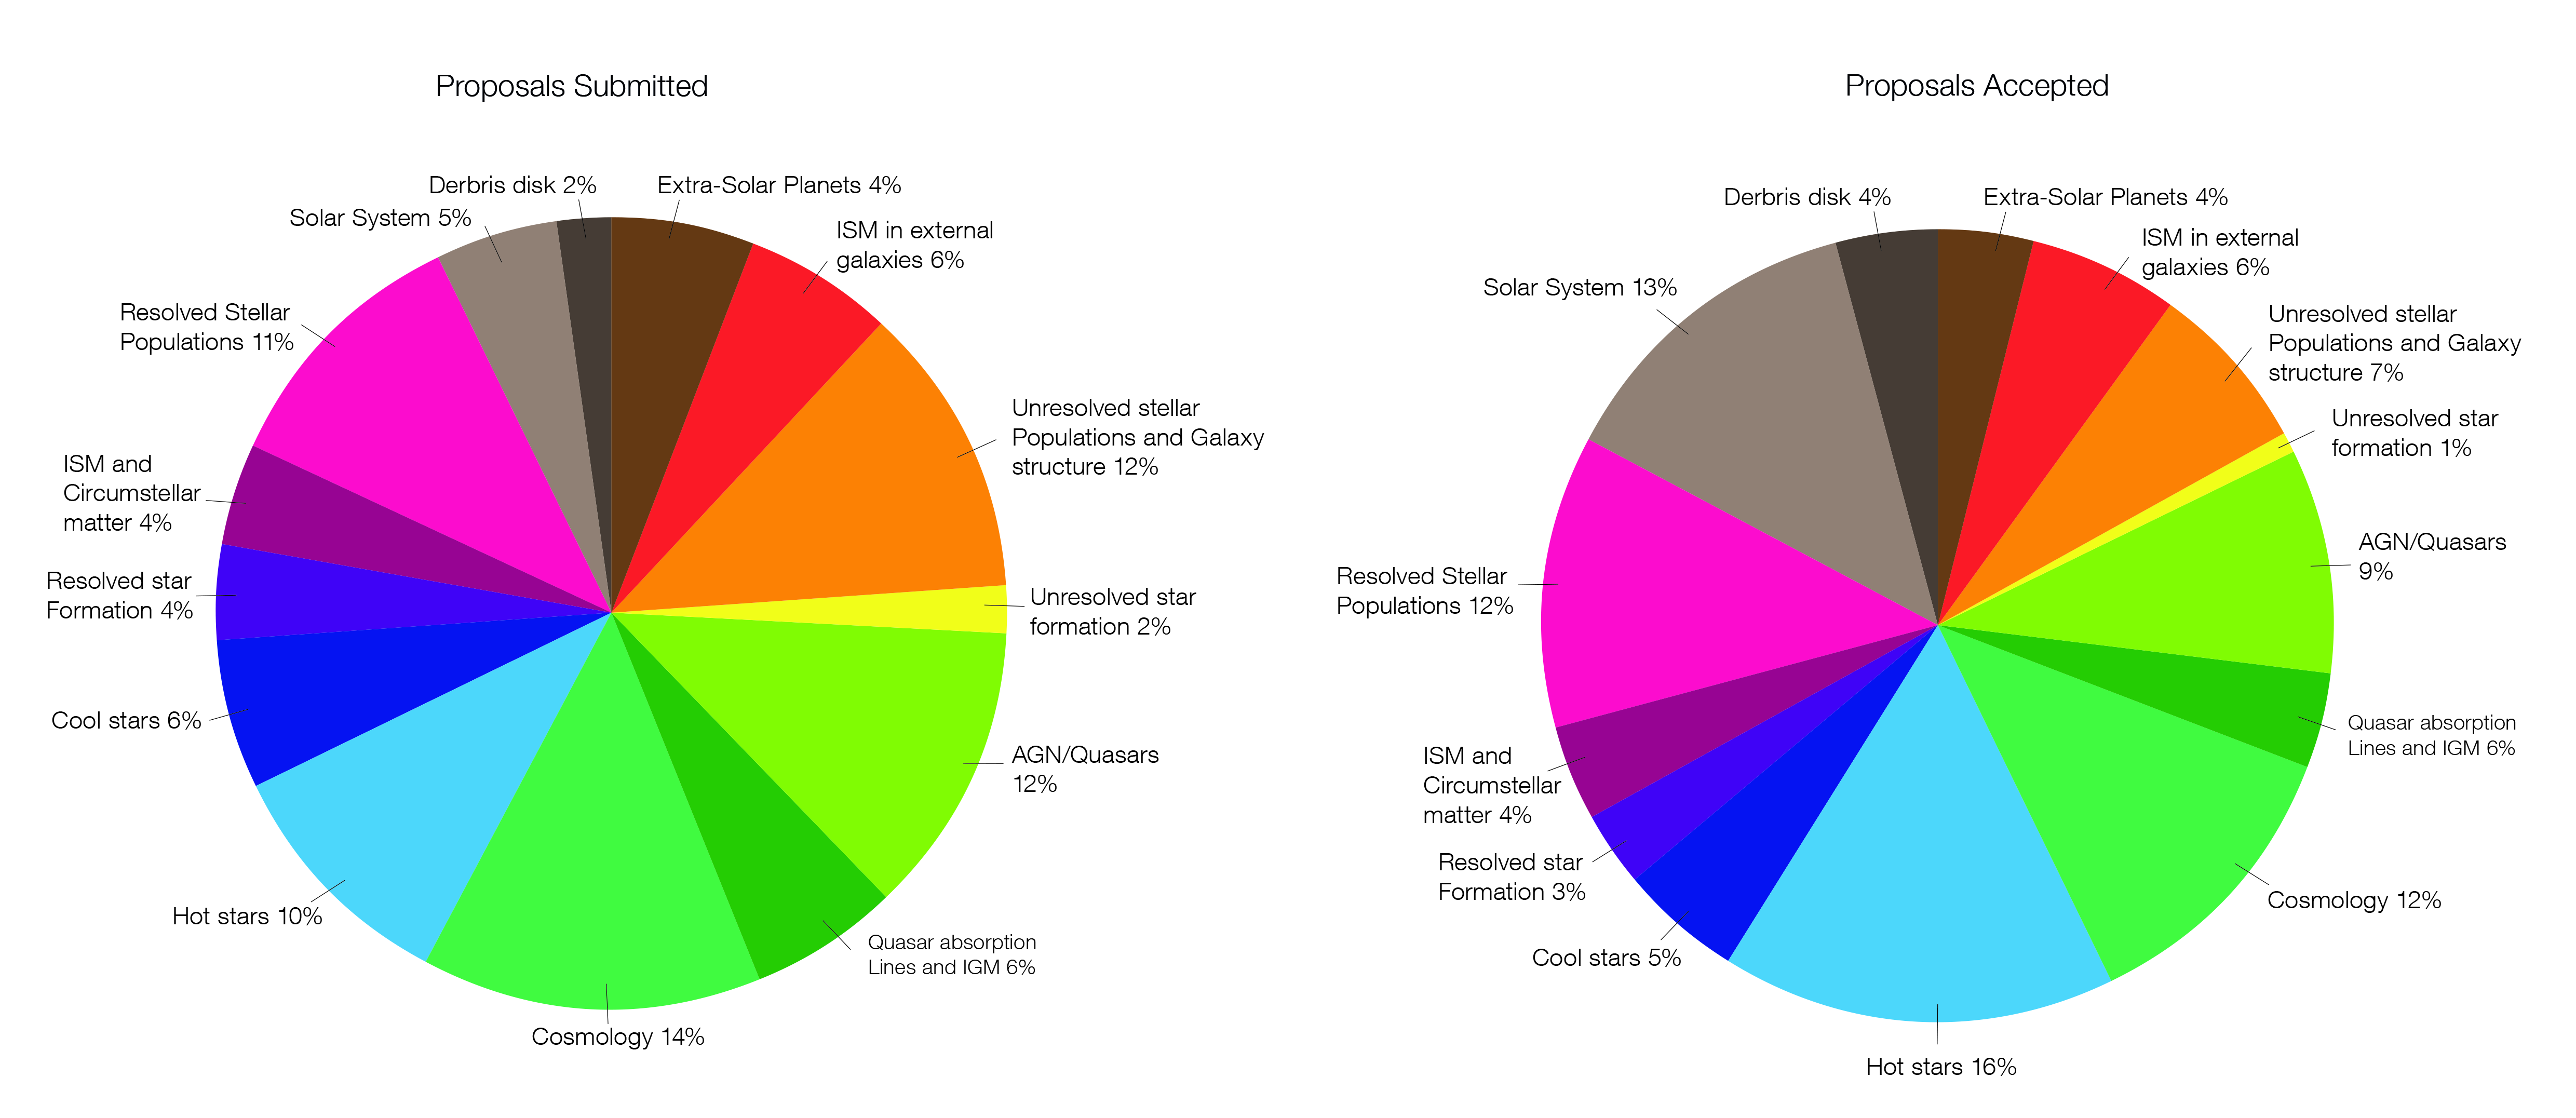

Comparison of the distribution of scientific topics for submitted and accepted proposals for the cycle 22 TAC

This figure compares the submitted and accepted proposals, divided by their scientific topic, submitted for Cycle 22. On the left is a chart showing the distribution of scientific topics for the submitted proposals and on the right is a chart showing the distribution of scientific topics for the accepted proposals.

These proposals were discussed and ranked at the time allocation committee in June 2014.

Credit: NASA and ESA